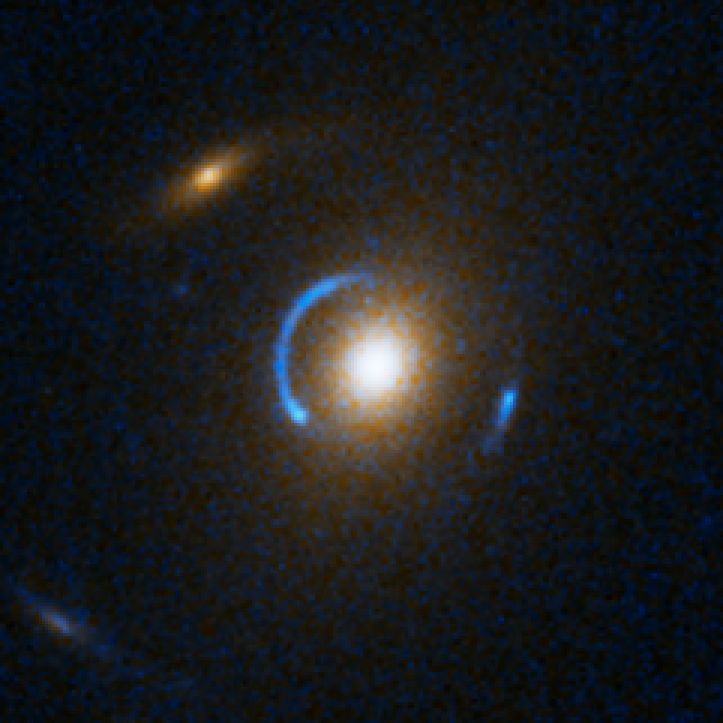

Einstein Ring Gravitational Lens: SDSS J120540.43+491029.3

This object is named SDSS J120540.43+491029.3. It is one of eight similar objects found by combining two powerful astronomical assets, the Sloan Digital Sky Survey (SDSS) and NASA's Hubble Space Telescope.

The objects are know as ‘Eienstein rings’ and are perhaps the most elegant manifestations of the gravitational lensing phenomina. Gravitational lensing occurs when the gravitational field from a massive object warps space and deflects light from a distant object behind it, allowing the distant object to be seen. Einstein rings are produced when two galaxies are almost perfectly aligned, one behind the other, giving an image like this with a reddish-white elliptical galaxy in the foreground and a thin ring of blue surrounding it — which is in fact the distorted light from another galaxy twice as far away.

Credit: NASA, ESA, A. Bolton (Harvard-Smithsonian CfA) and the SLACS Team